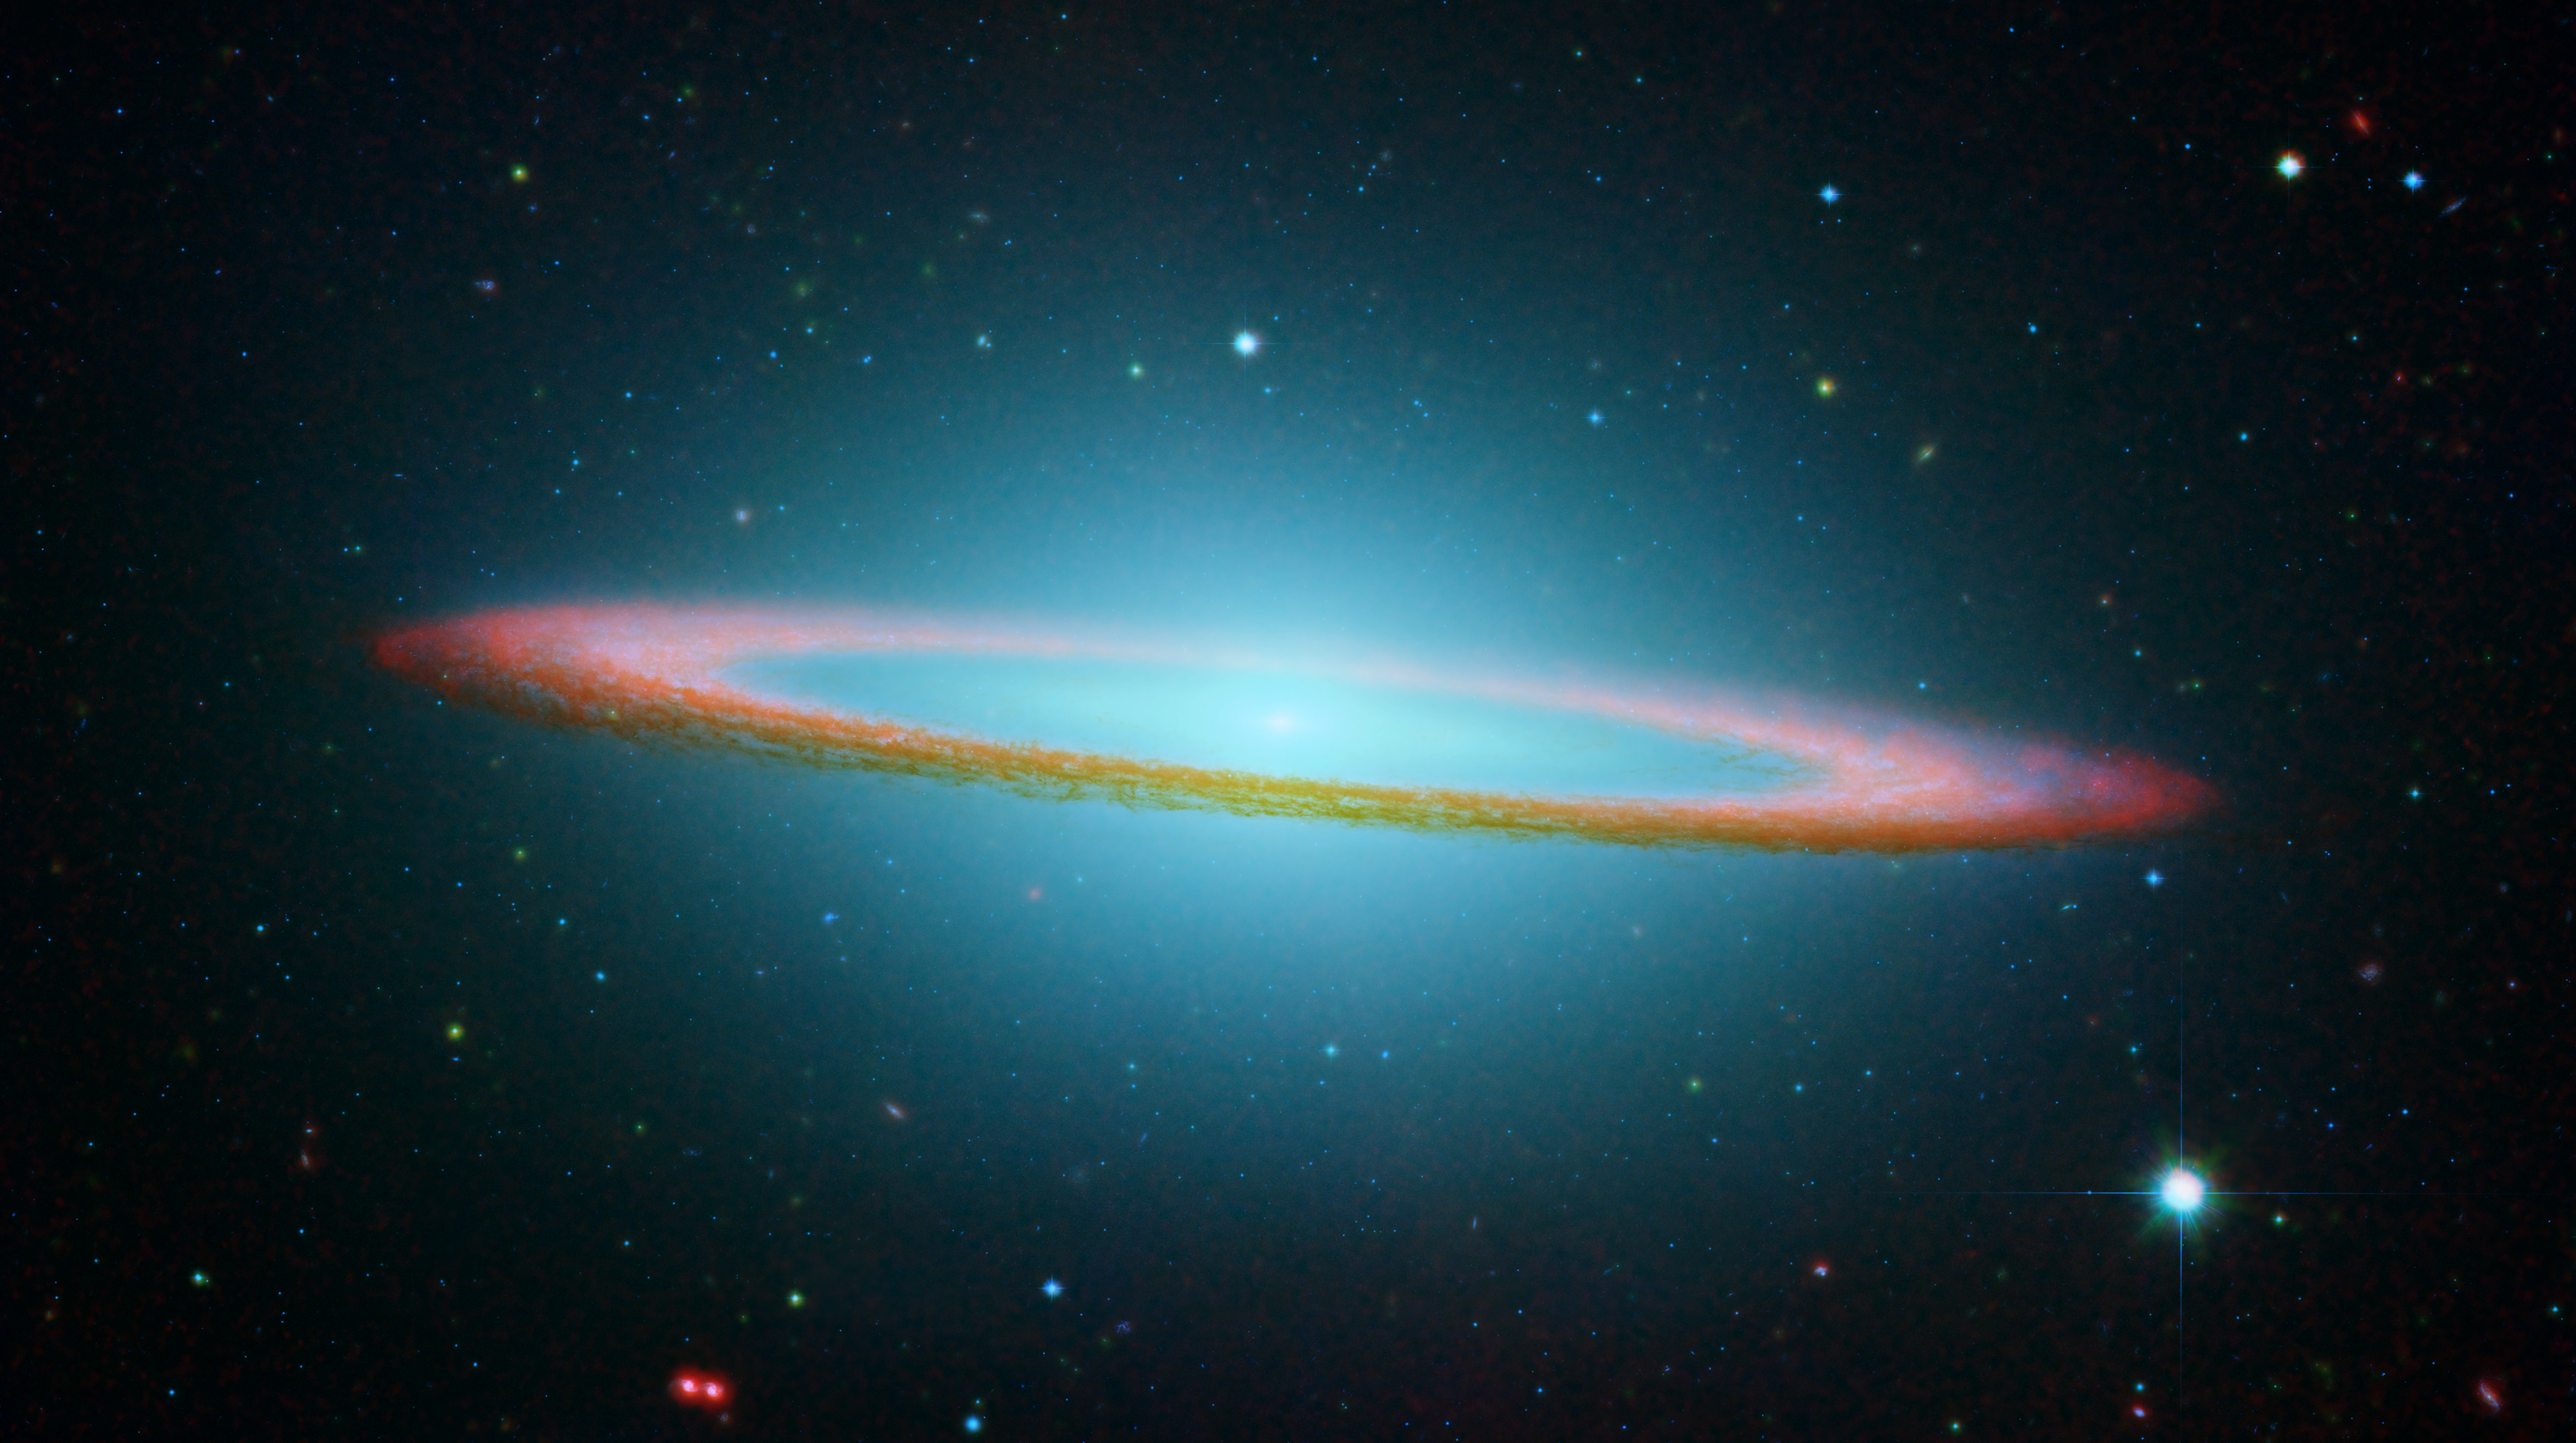

The Sombrero Galaxy in Infrared Light

NASA/ESA Hubble Space Telescope and NASA's Spitzer Space Telescope joined forces to create this striking composite image of one of the most popular sights in the universe. Messier 104 is commonly known as the Sombrero galaxy because in visible light, it resembles the broad-brimmed Mexican hat. However, in Spitzer's striking infrared view, the galaxy looks more like a "bull's eye."

Spitzer's full view shows the disk is warped, which is often the result of a gravitational encounter with another galaxy, and clumpy areas spotted in the far edges of the ring indicate young star-forming regions.

The Sombrero galaxy is located some 28 million light-years away. Viewed from Earth, it is just six degrees south of its equatorial plane. Spitzer detected infrared emission not only from the ring, but from the center of the galaxy too, where there is a huge black hole, believed to be a billion times more massive than our Sun.

The Spitzer picture is composed of four images taken at 3.6 (blue), 4.5 (green), 5.8 (orange), and 8.0 (red) microns. The contribution from starlight (measured at 3.6 microns) has been subtracted from the 5.8 and 8-micron images to enhance the visibility of the dust features.

Credit: NASA/JPL-Caltech and The Hubble Heritage Team (STScI/AURA)